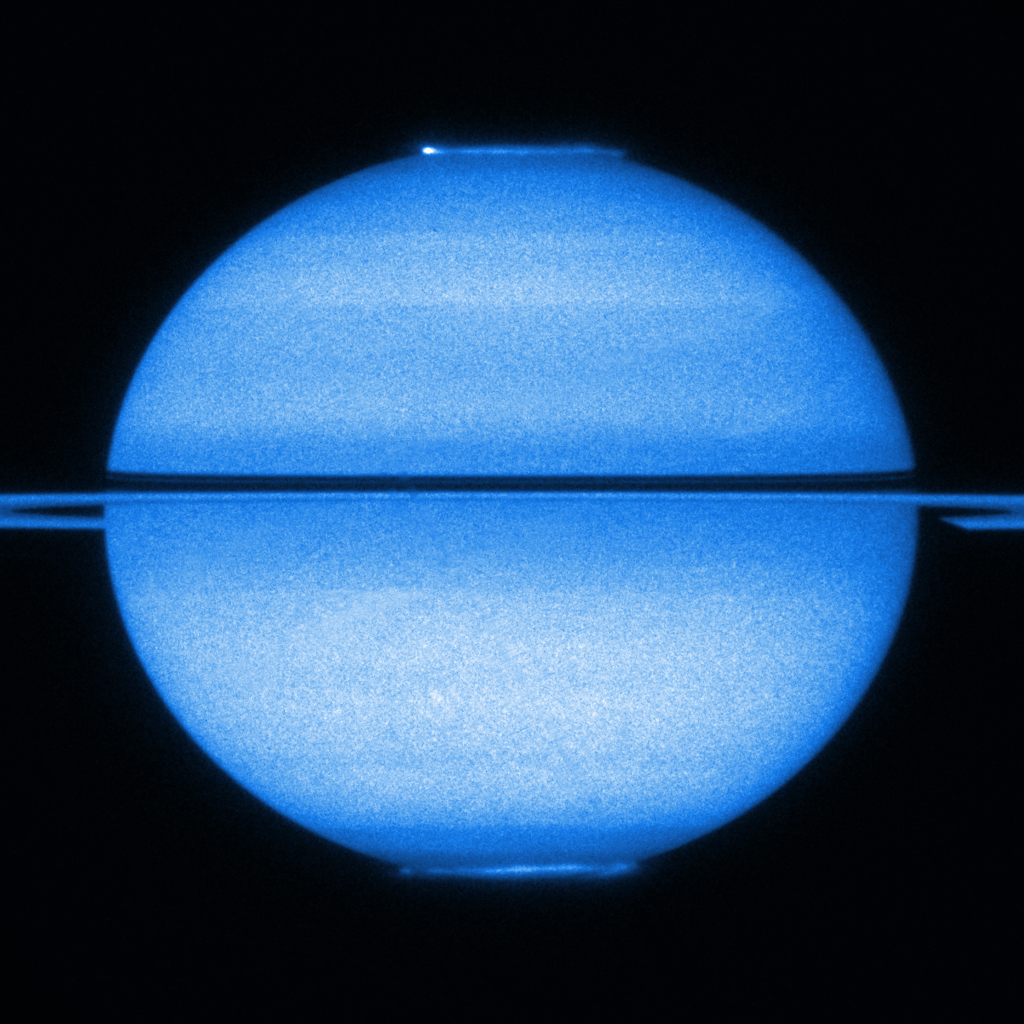

Double light show in a single shot: Hubble images both of Saturn's aurorae

An enormous and grand ringed planet, Saturn is certainly one of the most intriguing bodies orbiting the Sun. This unique Hubble image from early 2009 features Saturn with the rings edge-on and both poles in view, offering a stunning double view of its fluttering aurorae. Created by the interaction of the solar wind with the planet's magnetic field, Saturn's aurorae are analogous to the more familiar northern and southern light on Earth. At the time when Hubble snapped this picture, Saturn was approaching its equinox so both poles were equally illuminated by the Sun's rays.

At first glance the light show of Saturn's aurorae appears symmetric at the two poles. However, analysing the new data in greater detail, astronomers have discovered some subtle differences between the northern and southern aurorae, which reveal important information about Saturn's magnetic field. The northern auroral oval is slightly smaller and more intense than the southern one, implying that Saturn’s magnetic field is not equally distributed across the planet; it is slightly uneven and stronger in the north than the south.

Credit: NASA, ESA and Jonathan Nichols (University of Leicester)